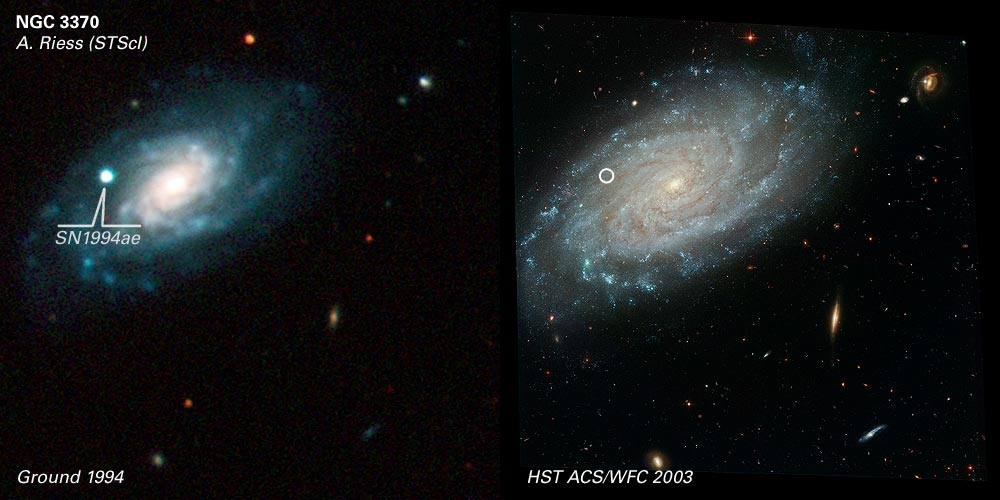

Comparison of Ground and ACS Images of NGC 3370

SN 1994ae was discovered by S. Van Dyk and the Leuschner Observatory Supernova Search (IAU Circular 6105) using an automated 0.76-meter telescope. The discovery image was taken on Nov. 14, 1994. The supernova was located about 30".3 west and 6".1 north of the galaxy's nucleus. The image on the left is from the 1.2-meter telescope at the Fred Lawrence Whipple Observatory (courtesy R. Schild/CfA) and was obtained in good conditions a few weeks after maximum light. The supernova peaked at ~13th magnitude in the visual. Extensive monitoring of the light curve in 5 colours was obtained beginning 2 weeks before maximum and provides one of the most complete photometric records of a supernova light curve (Riess et al. 1999). The image on the right is from HST 9 years later, by which time the supernova can no longer be detected. Many interesting features of the host as well as other background galaxies are blurred beyond recognition by the atmosphere in the ground-based image. HST, which sits above the distorting atmosphere, captures great detail at exquisite resolution.

Credit: NASA/ESA and A. Riess (STScI)